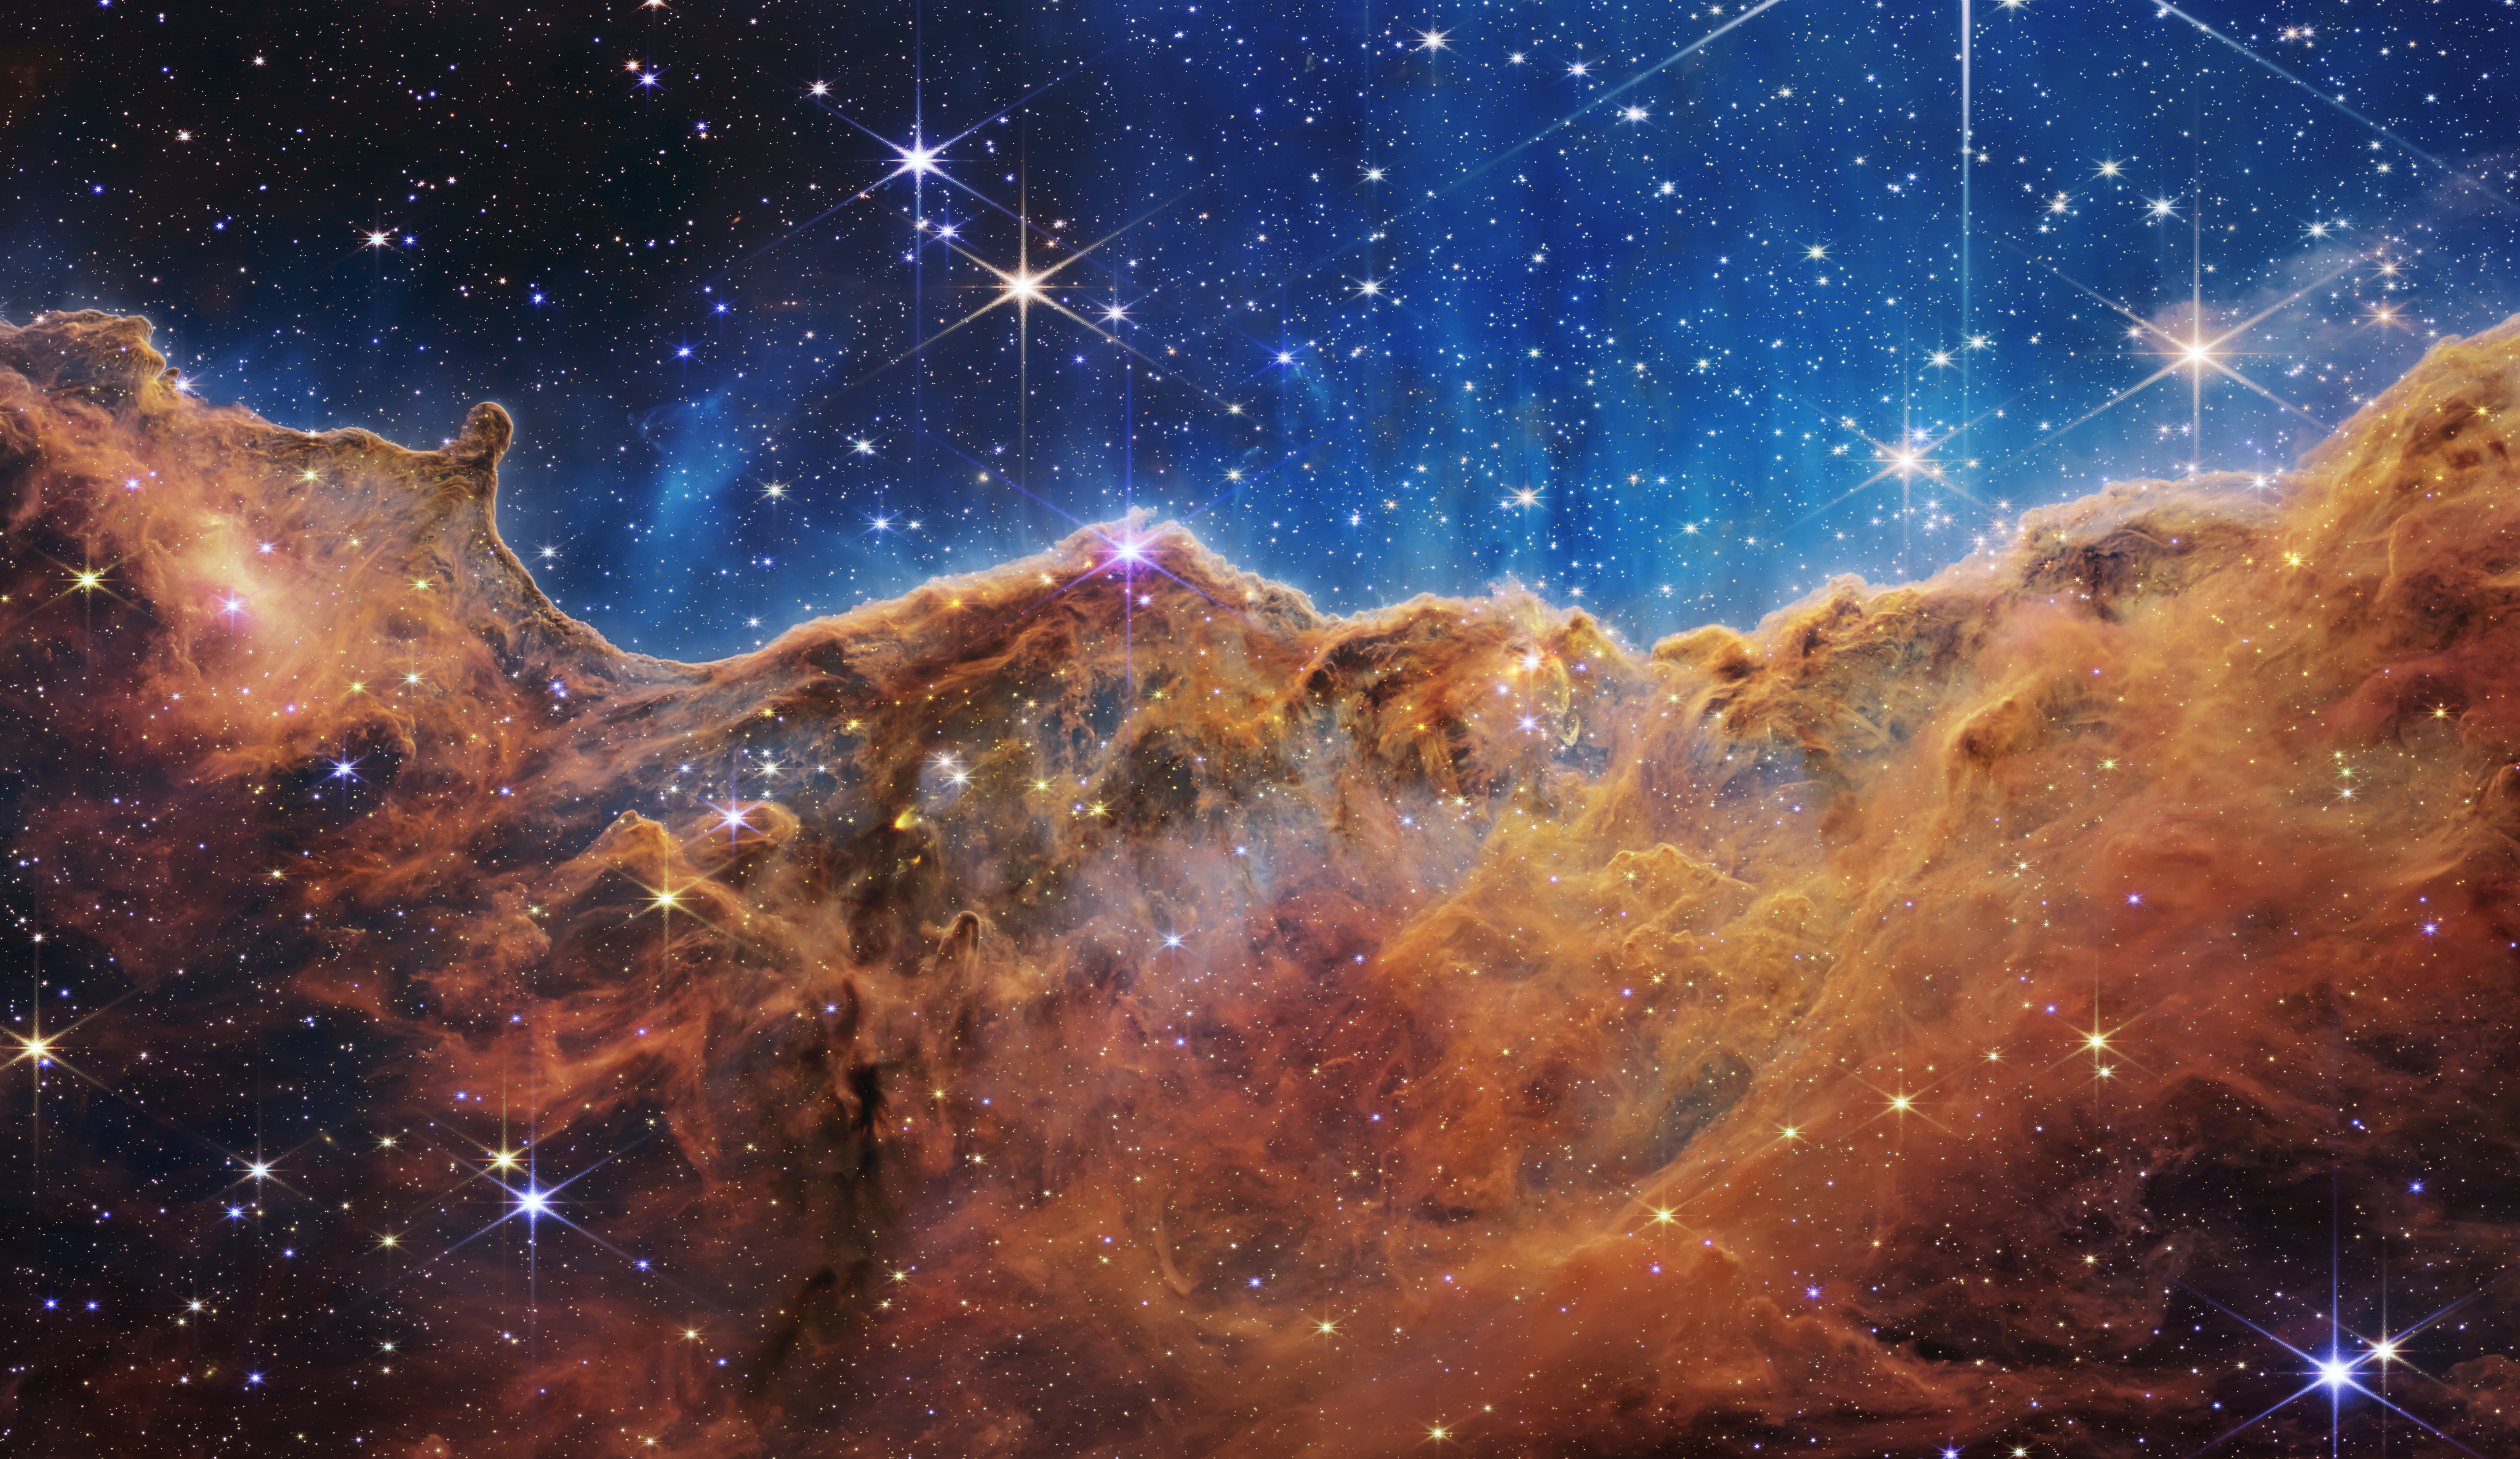

NIRCam Image of the “Cosmic Cliffs” in Carina

What looks much like craggy mountains on a moonlit evening is actually the edge of a nearby, young, star-forming region NGC 3324 in the Carina Nebula. Captured in infrared light by the Near-Infrared Camera (NIRCam) on the NASA/ESA/CSA James Webb Space Telescope, this image reveals previously obscured areas of star birth.

Called the Cosmic Cliffs, the region is actually the edge of a gigantic, gaseous cavity within NGC 3324, roughly 7,600 light-years away. The cavernous area has been carved from the nebula by the intense ultraviolet radiation and stellar winds from extremely massive, hot, young stars located in the centre of the bubble, above the area shown in this image. The high-energy radiation from these stars is sculpting the nebula’s wall by slowly eroding it away.

NIRCam – with its crisp resolution and unparalleled sensitivity – unveils hundreds of previously hidden stars, and even numerous background galaxies. Several prominent features in this image are described below.

The “steam” that appears to rise from the celestial “mountains” is actually hot, ionised gas and hot dust streaming away from the nebula due to intense, ultraviolet radiation.
Dramatic pillars rise above the glowing wall of gas, resisting the blistering ultraviolet radiation from the young stars.
Bubbles and cavities are being blown by the intense radiation and stellar winds of newborn stars.
Protostellar jets and outflows, which appear in gold, shoot from dust-enshrouded, nascent stars.
A “blow-out” erupts at the top-centre of the ridge, spewing gas and dust into the interstellar medium.
An unusual “arch” appears, looking like a bent-over cylinder.

This period of very early star formation is difficult to capture because, for an individual star, it lasts only about 50,000 to 100,000 years – but Webb’s extreme sensitivity and exquisite spatial resolution have chronicled this rare event.

Located roughly 7,600 light-years away, NGC 3324 was first catalogued by James Dunlop in 1826. Visible from the Southern Hemisphere, it is located at the northwest corner of the Carina Nebula (NGC 3372), which resides in the constellation Carina. The Carina Nebula is home to the Keyhole Nebula and the active, unstable supergiant star called Eta Carinae.

NIRCam was built by a team at the University of Arizona and Lockheed Martin’s Advanced Technology Center.

For a full array of Webb’s first images and spectra, including downloadable files, please visit: https://esawebb.org/initiatives/webbs-first-images/

Credit: NASA, ESA, CSA, and STScI